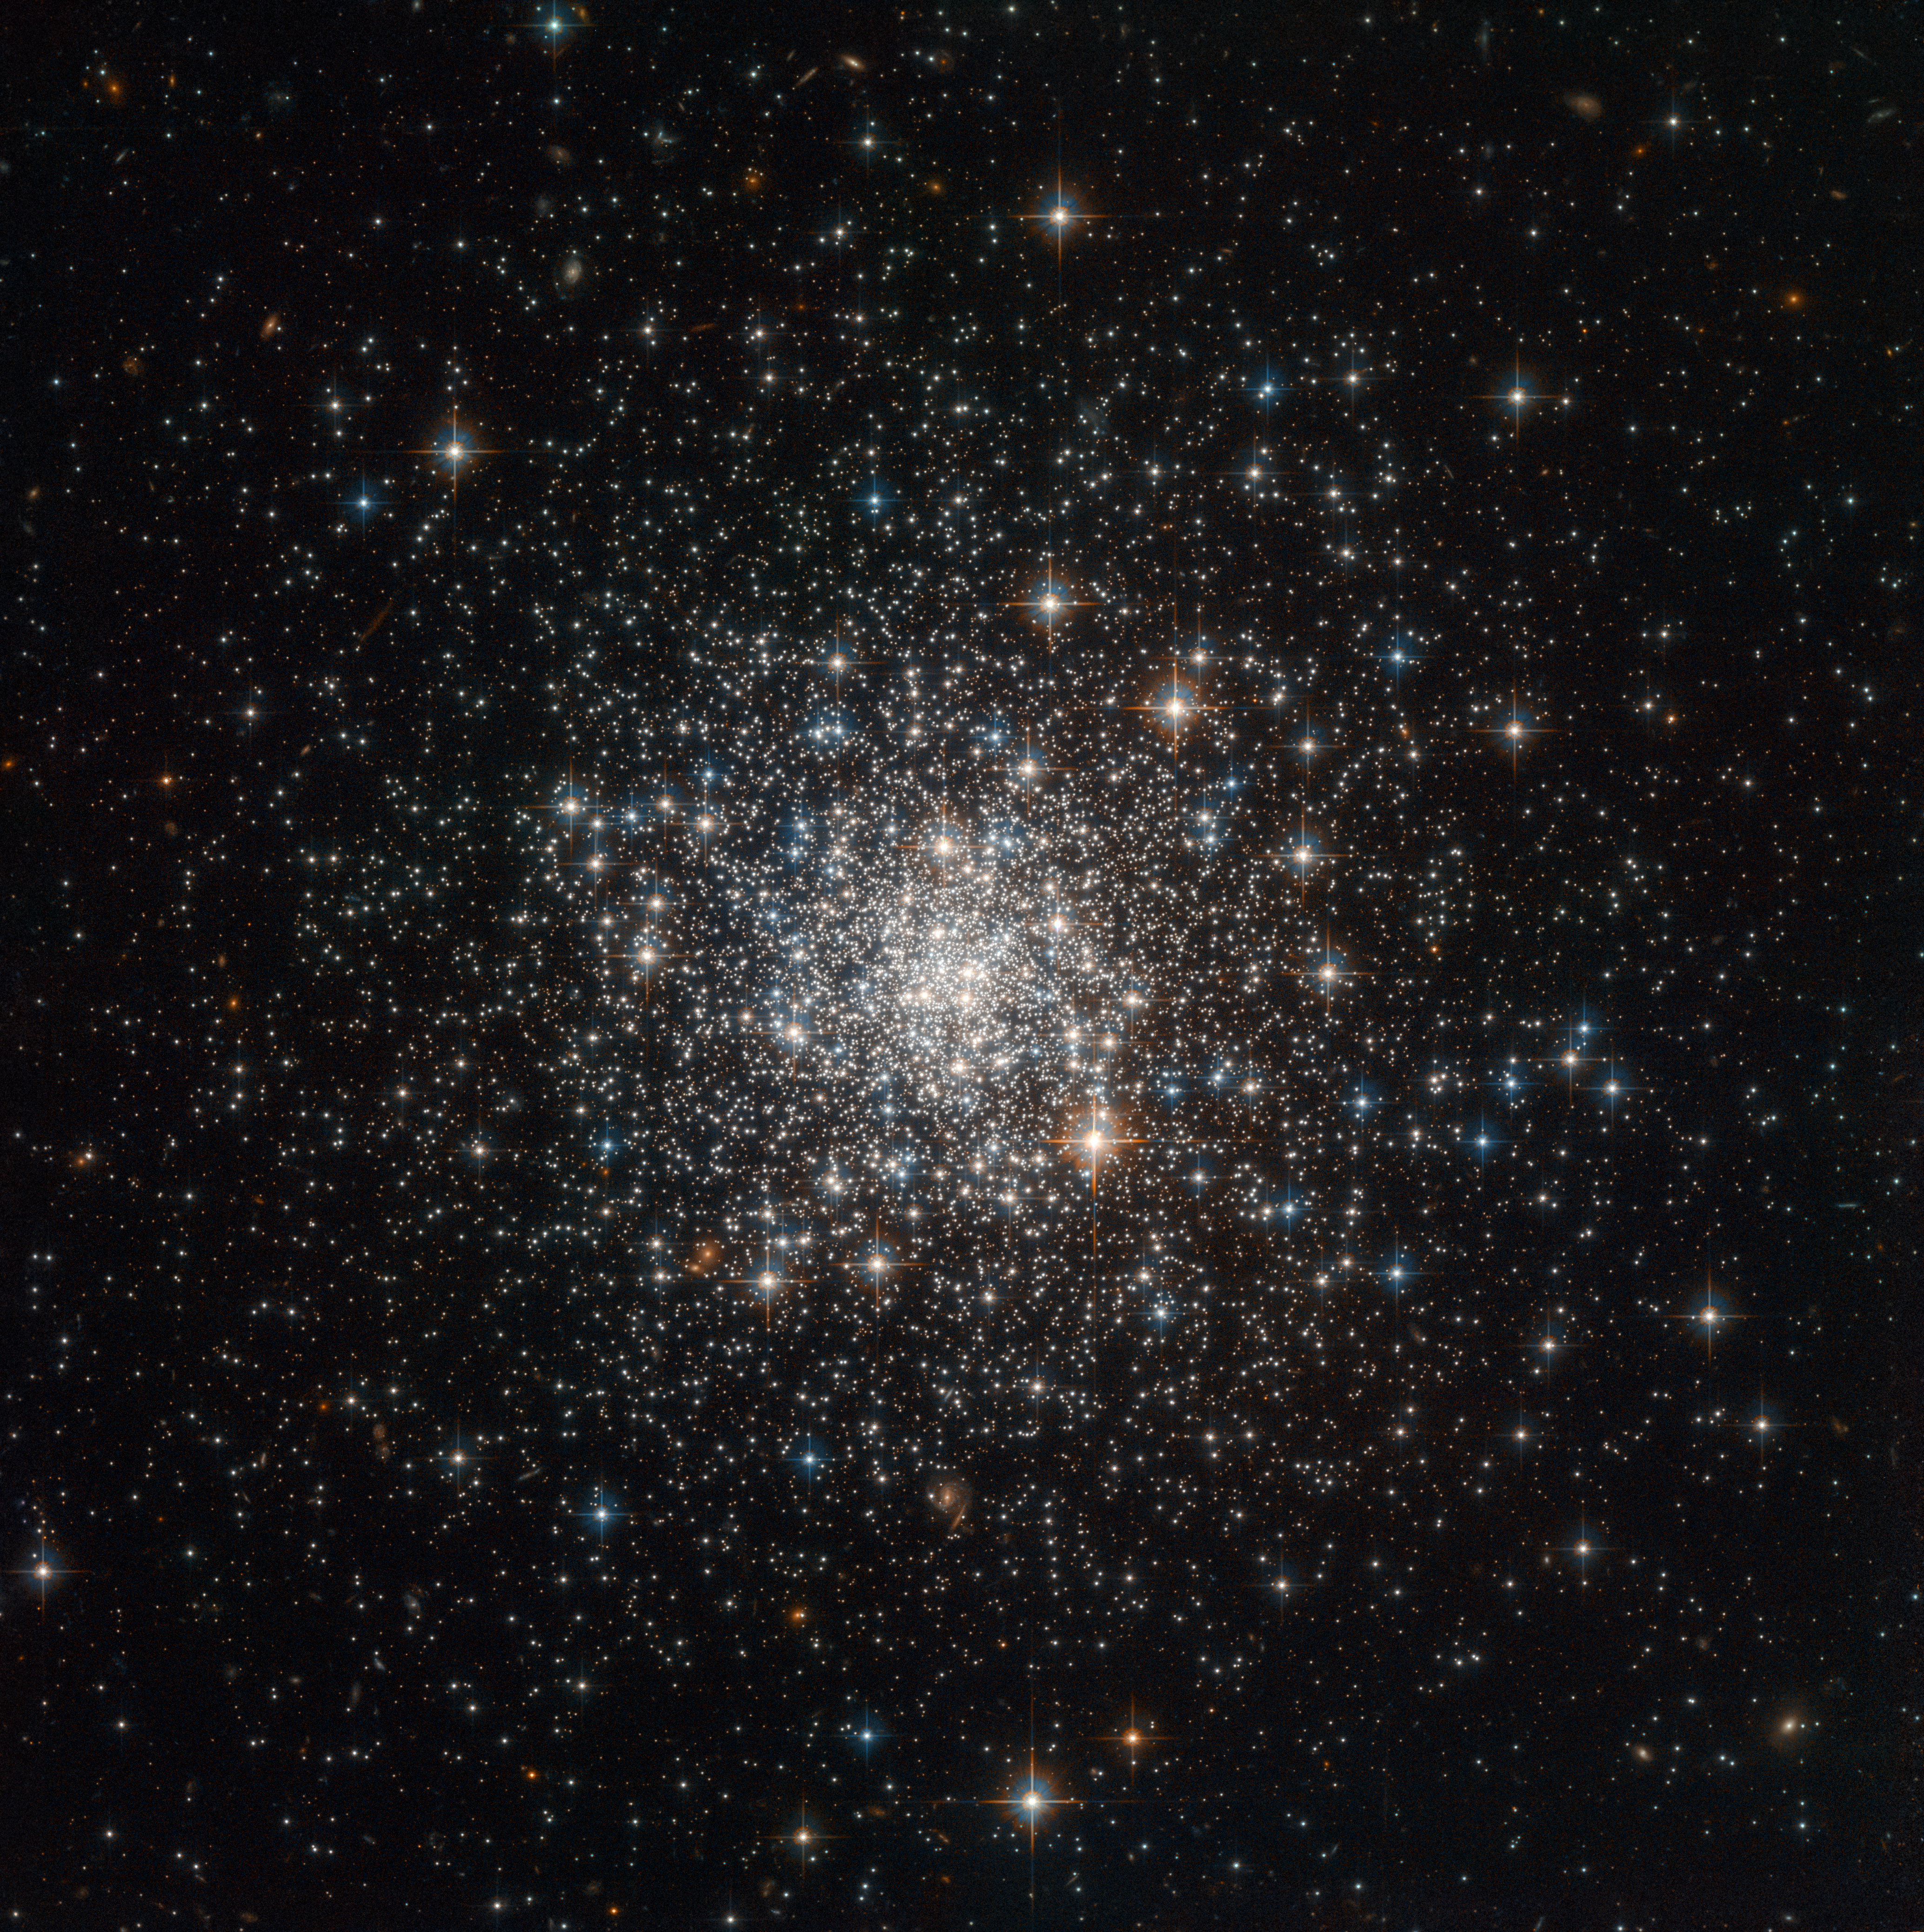

Globular cluster NGC 4147

This globular cluster, NGC 4147, seen with the NASA/ESA Hubble Space Telescope, was one of many which were used by astronomers to measure the total mass of the Milky Way.

NGC 4147 is located about 60 000 light-years from Earth in the northern constellation of Coma Berenices (the Berenice's hair).

Credit: ESA/Hubble & NASA, T. Sohn et al.